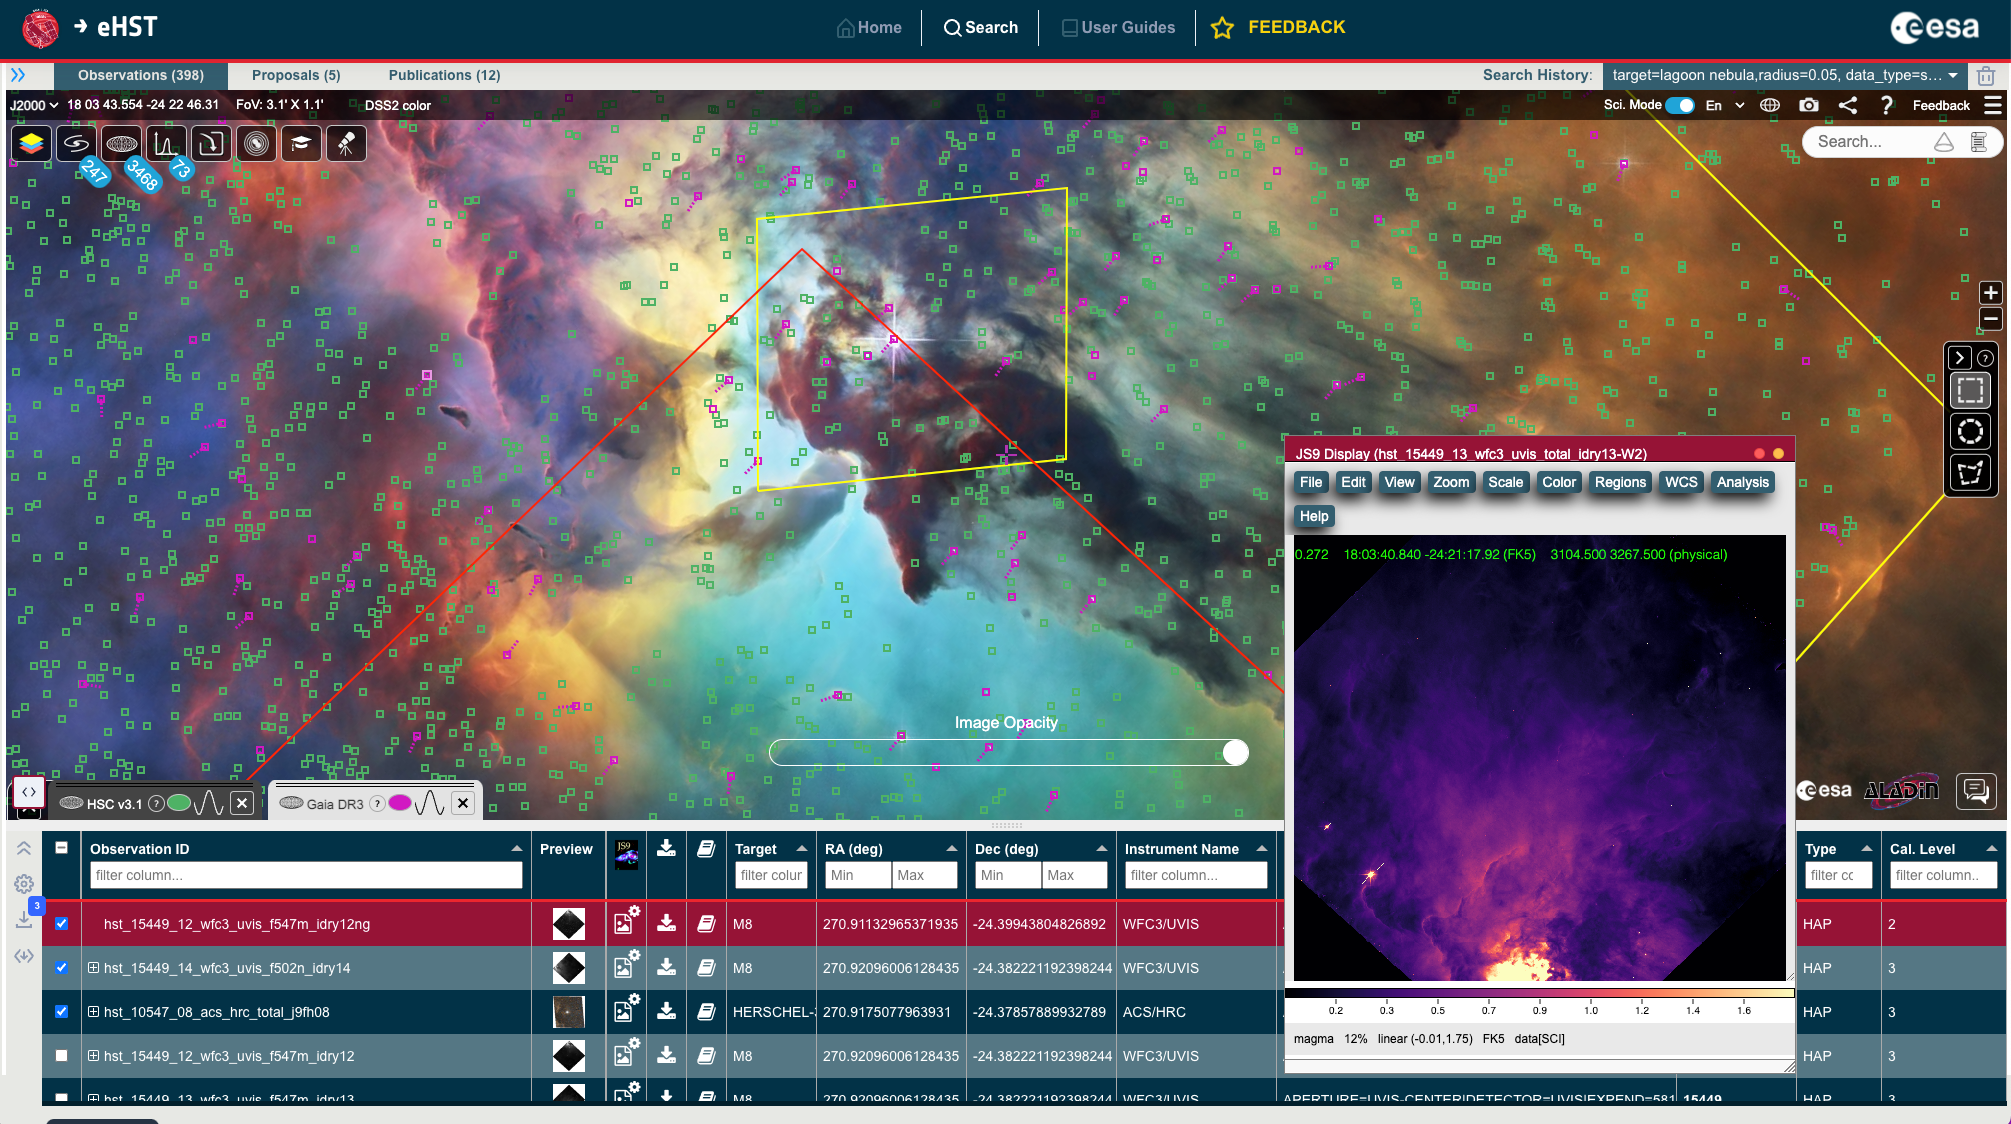

eHST User Interface

This is a screenshot from eHST showing the integration of ESASky with Hubble data footprints and files for a target of interest; the subset panel is the image visualisation tool for one of the selected files.

Credit: ESA/Hubble